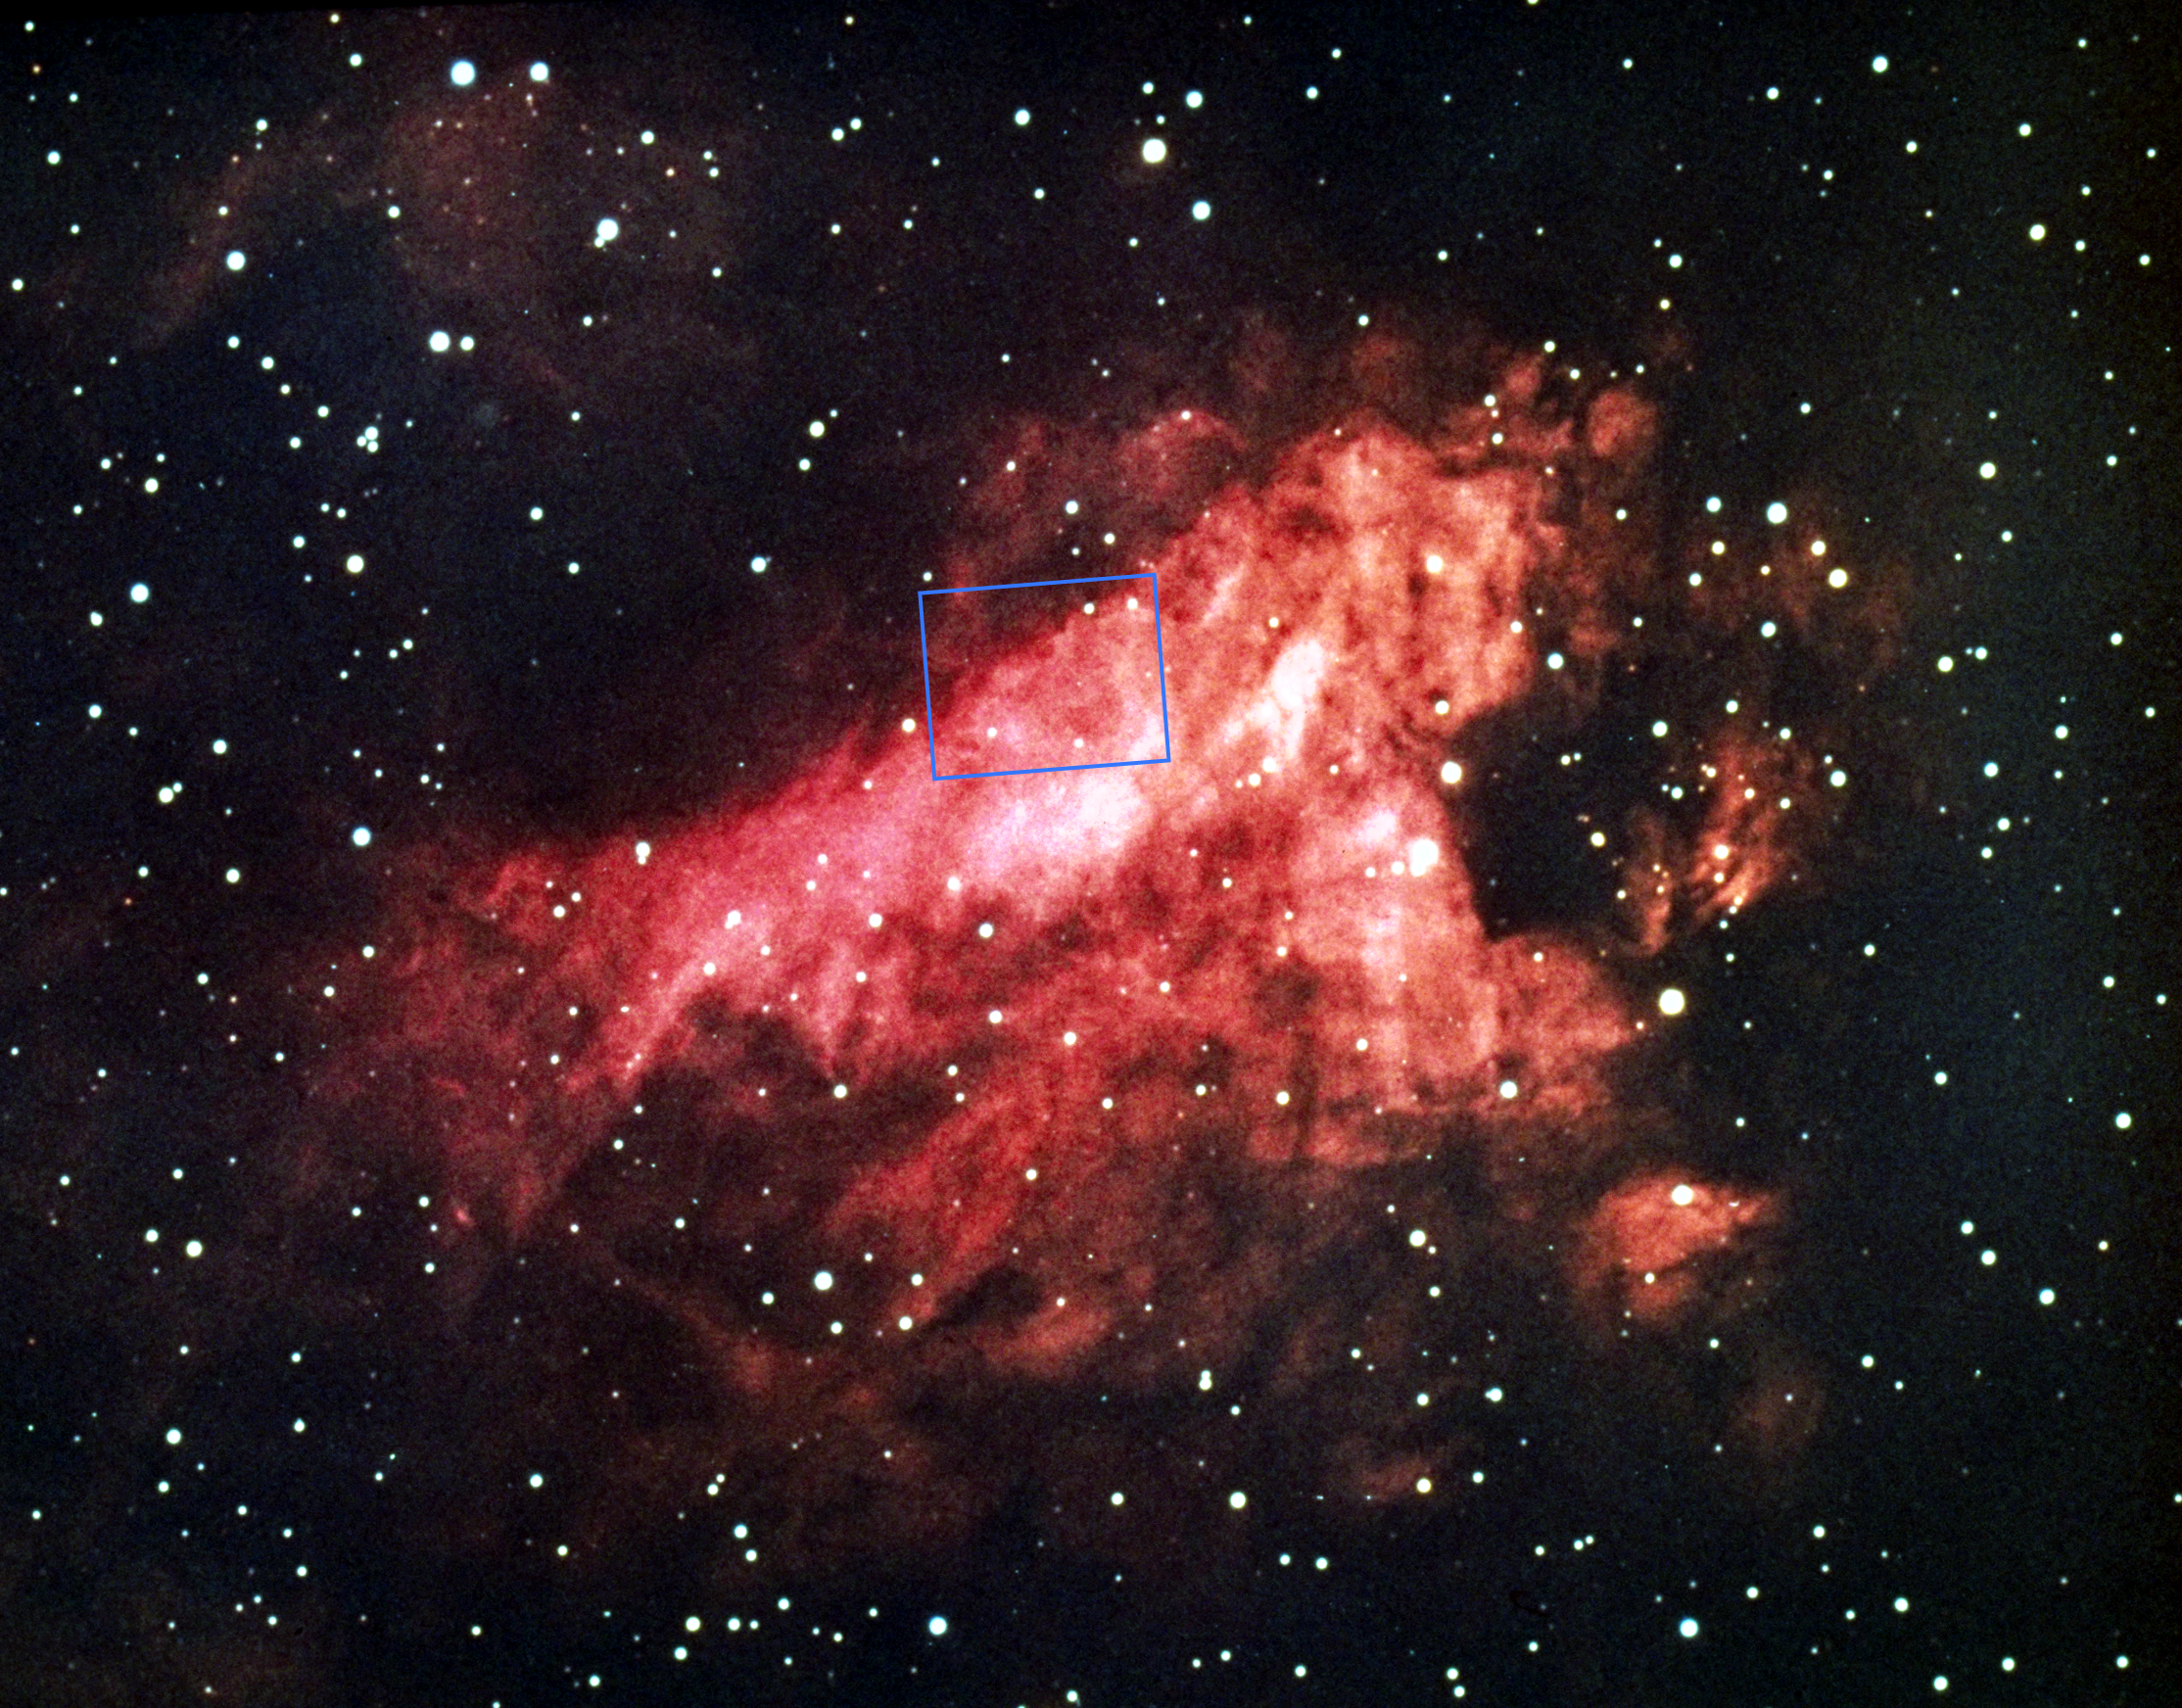

Messier 17, the Omega Nebula (NOAO image)

This is a ground-based overview of the Omega or Swan Nebula. The outline of the field observed by the NASA/ESA Hubble Space Telescope is shown.

Credit: NOAO/AURA/NSF